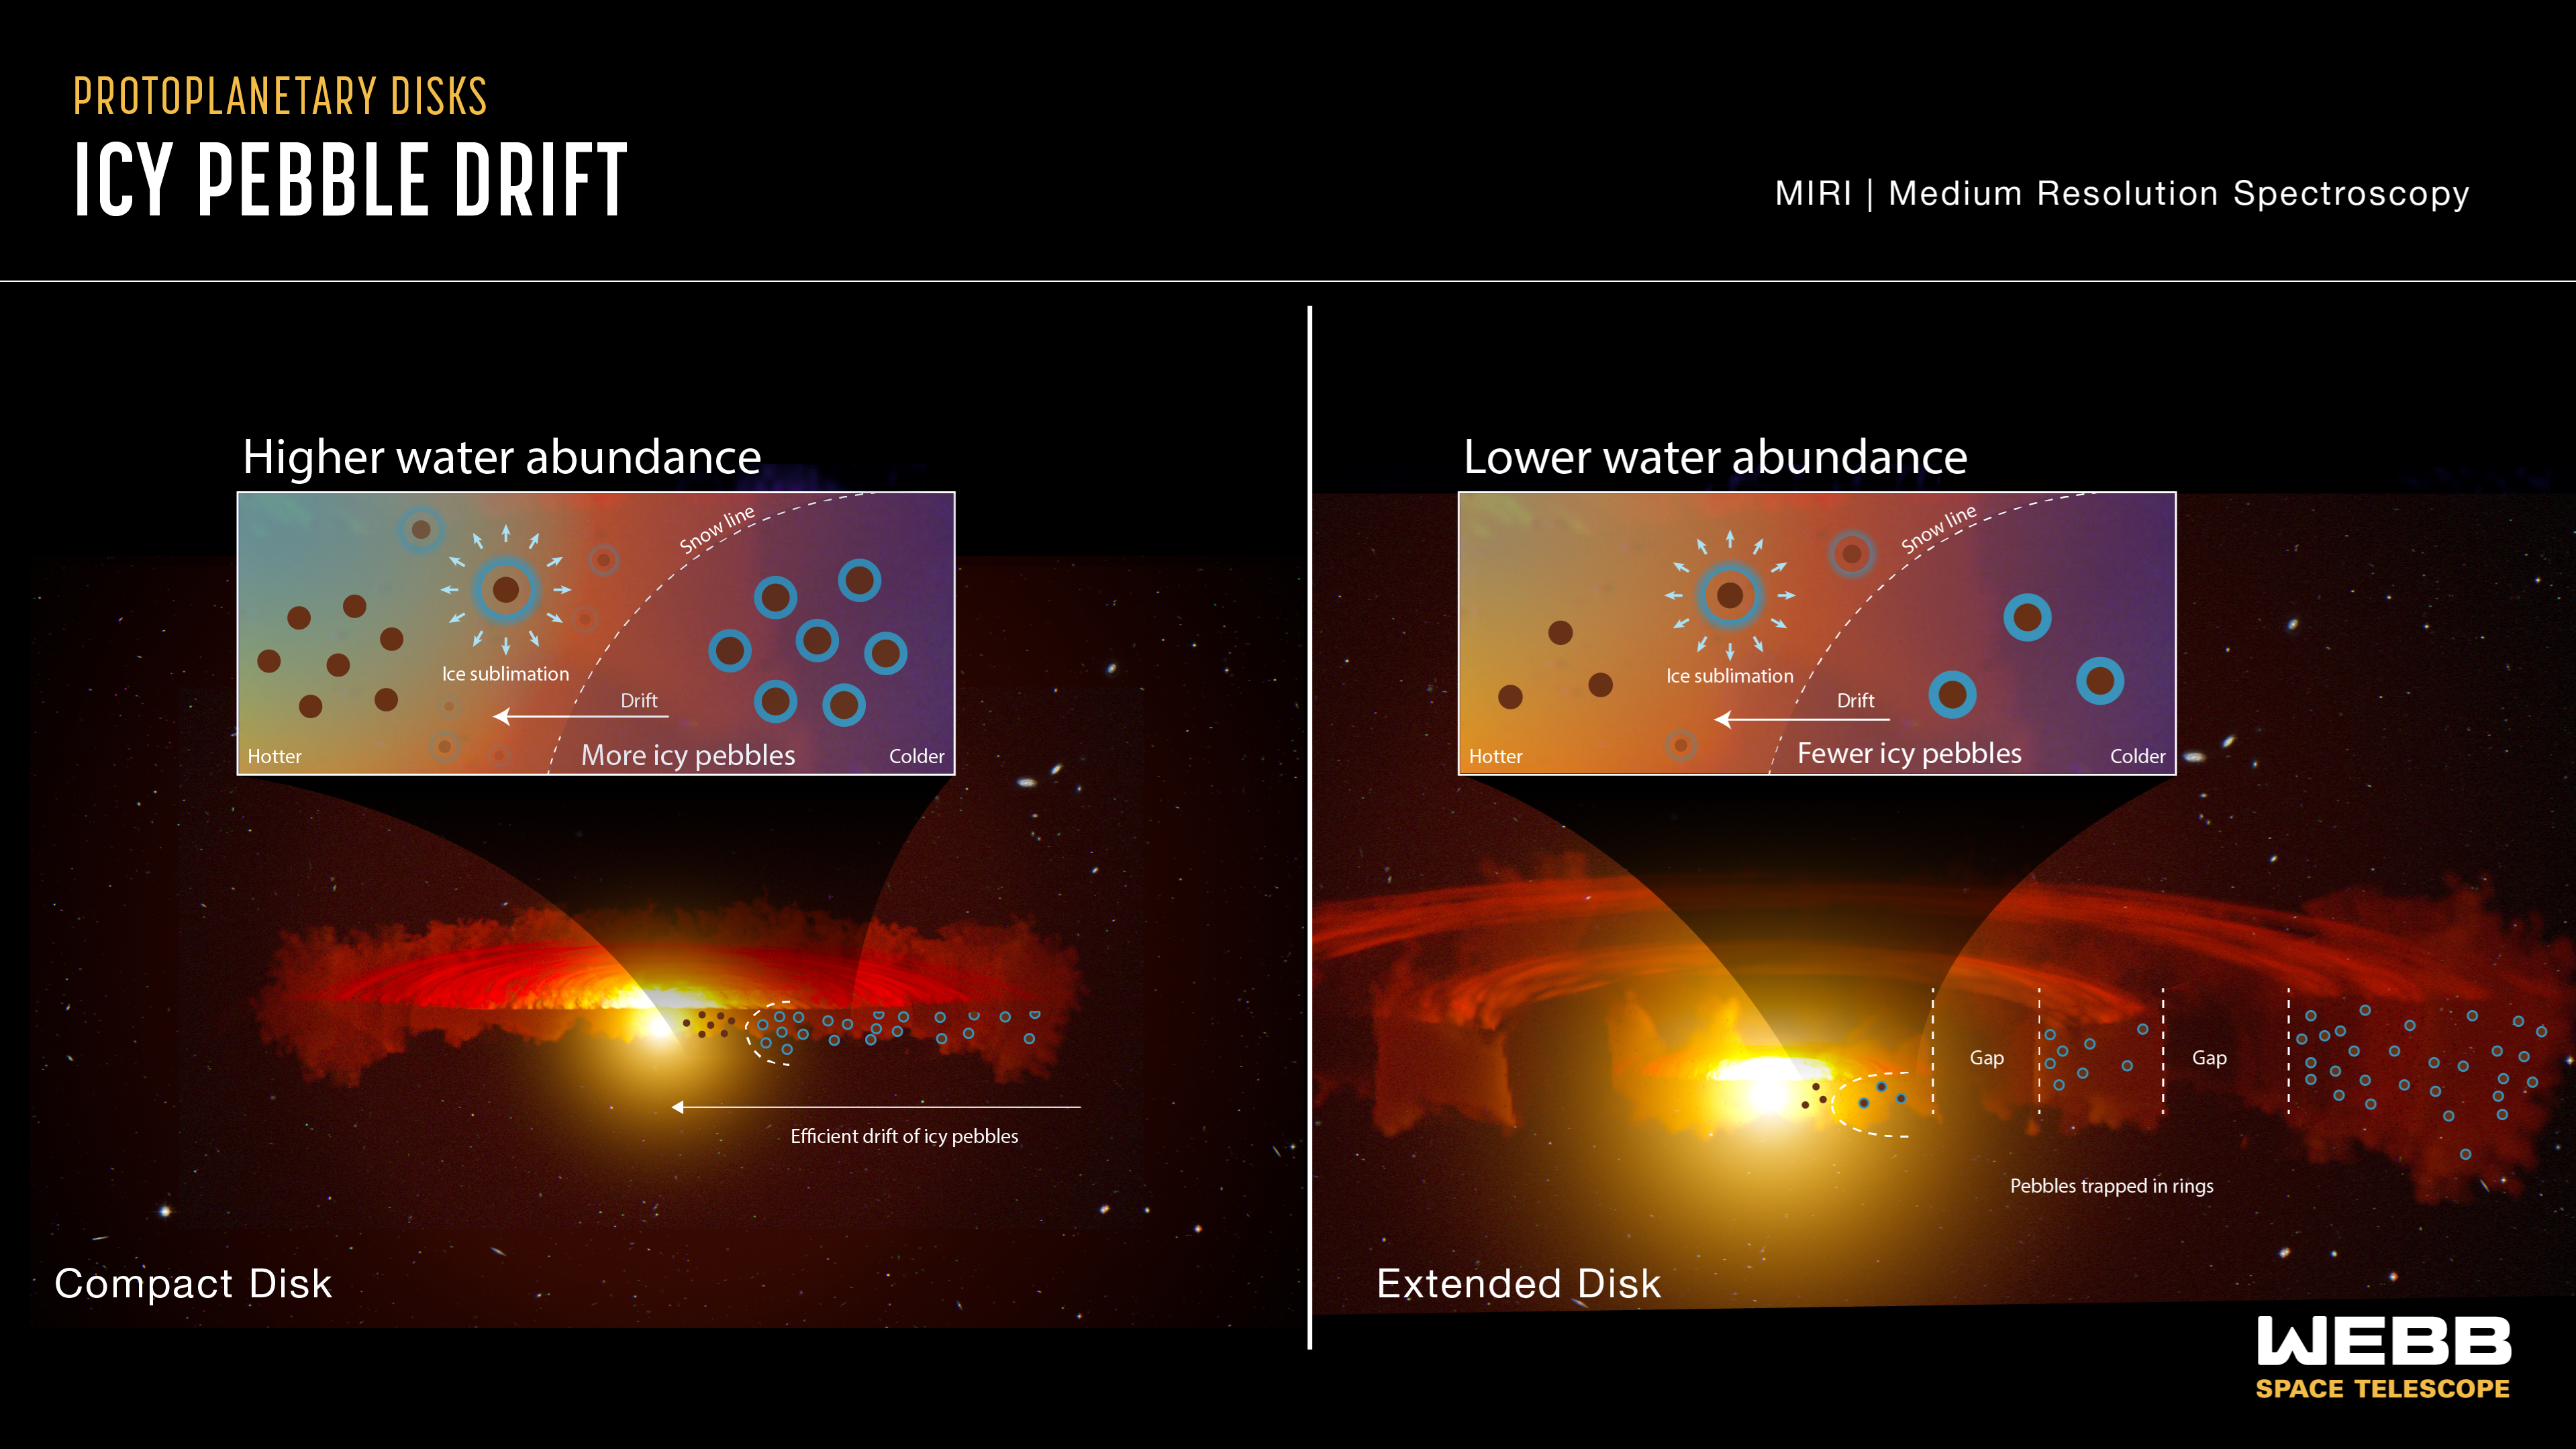

Icy pebble drift (infographic)

Scientists using the NASA/ESA/CSA James Webb Space Telescope made a breakthrough discovery in revealing how planets are made. By observing water vapour in protoplanetary disks, Webb confirmed a physical process involving the drifting of ice-coated solids from the outer regions of the disk into the rocky-planet zone.

Theories have long proposed that icy pebbles forming in the cold, outer regions of protoplanetary disks — the same area where comets originate in our solar system — should be the fundamental seeds of planet formation. The main requirement of these theories is that pebbles should drift inward toward the star due to friction in the gaseous disk, delivering both solids and water to planets. A fundamental prediction of this theory is that as icy pebbles enter into the warmer region within the "snowline" — where ice transitions to vapour — they should release large amounts of cold water vapour. This is exactly what Webb observed.

Webb observations were designed to determine whether compact disks have a higher water abundance in their inner, rocky planet region, as expected if pebble drift is more efficient and is delivering lots of solid mass and water to inner planets. Researchers chose to use MIRI’s MRS (the Medium-Resolution Spectrometer) because it is sensitive to water vapour in disks. The results confirmed expectations by revealing excess cool water in the compact disks, compared with the large disks. As the pebbles drift, any time they encounter a pressure bump — an increase in pressure — they tend to collect there. These pressure traps don’t necessarily shut down pebble drift, but they do impede it. This is what appears to be happening in the large disks with rings and gaps.

This graphic is an interpretation of data from Webb’s MIRI, the Mid-Infrared Instrument, which is sensitive to water vapour in disks. It shows the difference between pebble drift and water content in a compact disk versus an extended disk with rings and gaps. In the compact disk on the left, as the ice-covered pebbles drift inward toward the warmer region closer to the star, they are unimpeded. As they cross the snow line, their ice turns to vapour and provides a large amount of water to enrich the just-forming, rocky, inner planets. On the right is an extended disk with rings and gaps. As the ice-covered pebbles begin their journey inward, many become stopped by the gaps and trapped in the rings. Fewer icy pebbles are able to make it across the snow line to deliver water to the inner region of the disk.

These results appear in the 8 November 2023 edition of the Astrophysical Journal Letters.

Credit: NASA, ESA, CSA, J. Olmsted (STScI)